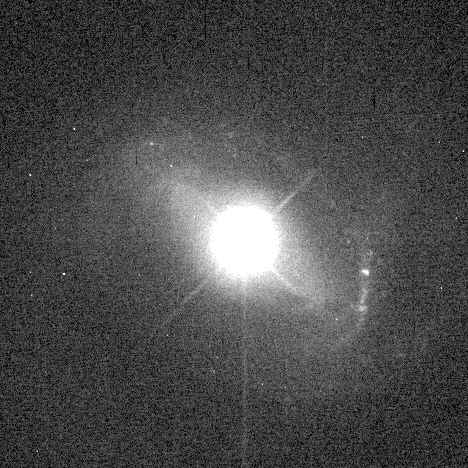

Quasar host galaxy

This Hubble Space Telescope image reveals the faint host galaxy that a bright quasar dwells within. The wealth of new detail in this picture helps solve a three-decade old mystery about the true nature of quasars, the most distant and energetic objects in the universe.

Credit: Dr. John Hutchings, Dominion Astrophysical Observatory, NASA/ESA